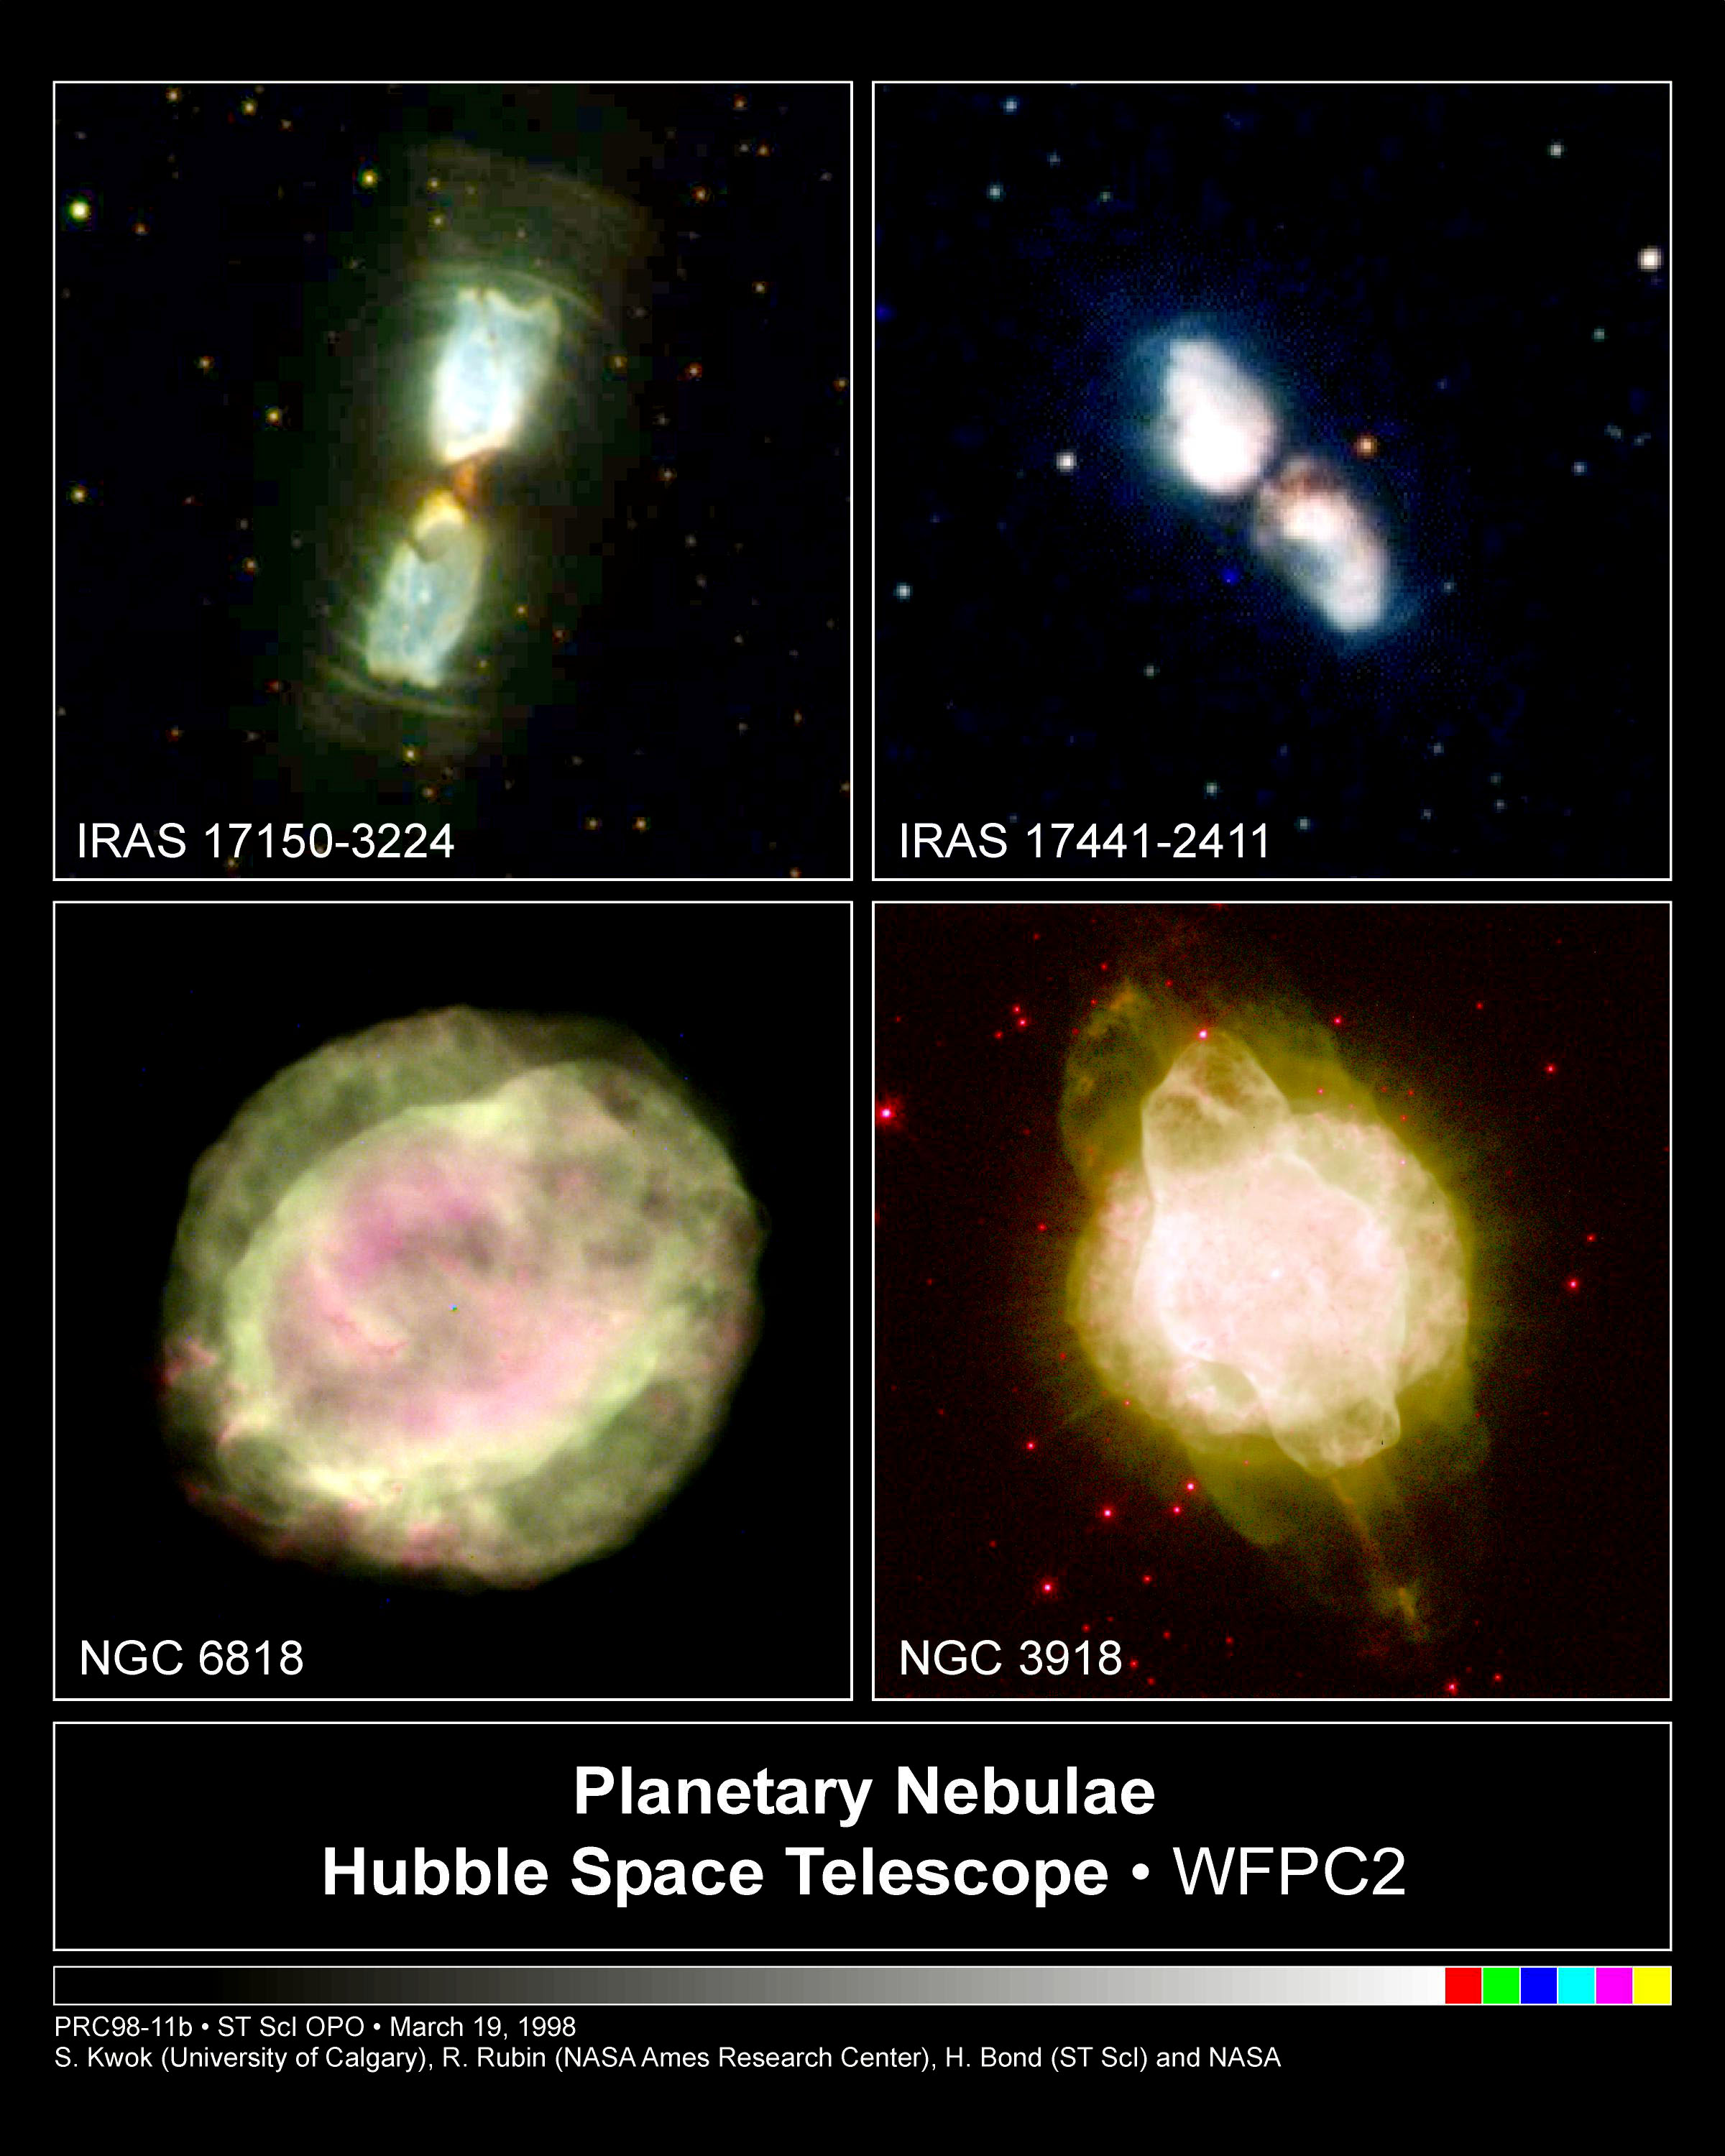

Planetary Nebulae

The nebulae are being illuminated by light from the invisible central star, which is then reflected toward us. We are viewing the nebulae edge-on, where the direct starlight is blocked by the dusty cocoon. Otherwise, the starlight would overwhelm the nebular light, making it very difficult to see the butterfly-shaped nebula. In a few hundred years, intense ultraviolet radiation from the central star will energize the surrounding gas, causing it to glow brightly, and a planetary nebula is born.

Credit: S. Kwok (University of Calgary), R. Rubin (NASA/ESA Ames Research Center), H. Bond (ST ScI) and NASA/ESA